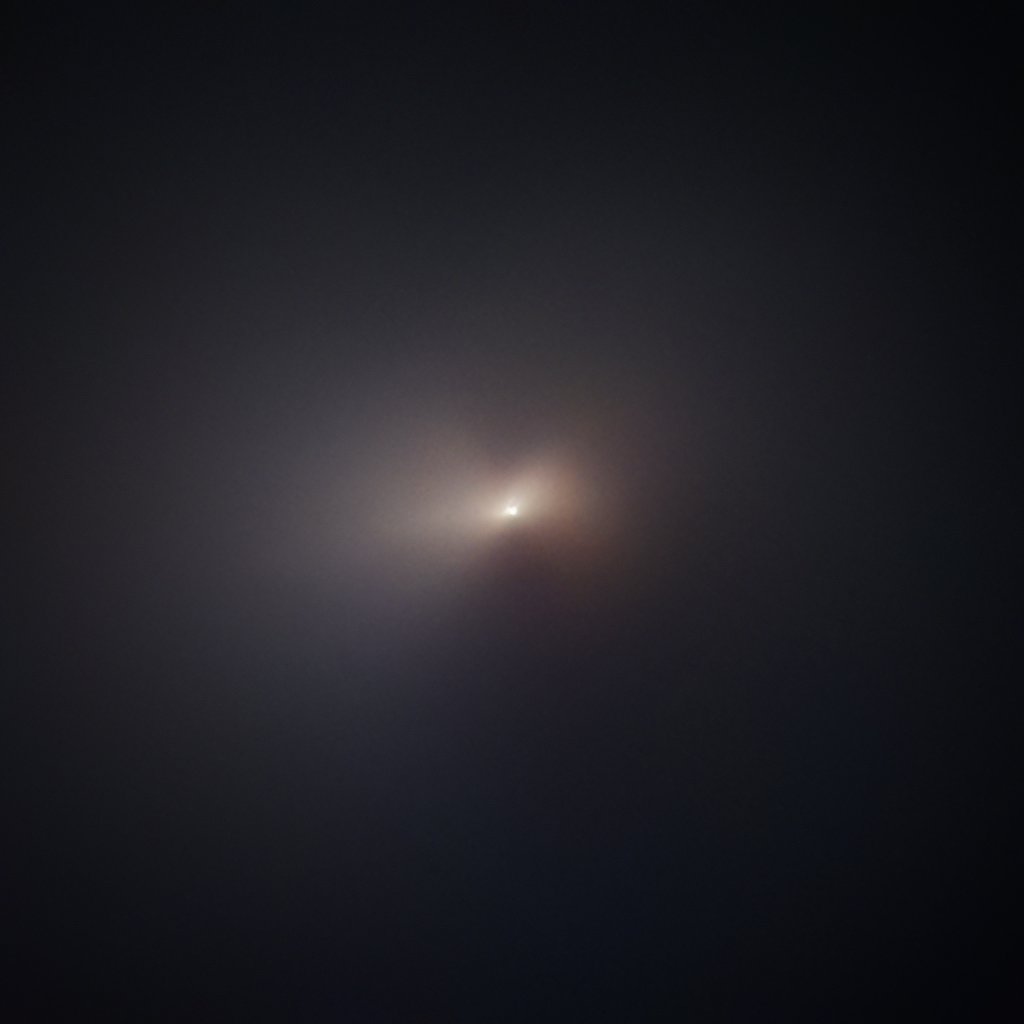

Hubble Captures Comet NEOWISE

The NASA/ESA Hubble Space Telescope has captured the closest images yet of the sky’s latest visitor to make the headlines, comet C/2020 F3 NEOWISE, after it passed by the Sun. This color image of the comet was taken on 8 August 2020.

The two structures appearing on the left and right sides of the comet's center are jets of sublimating ice from beneath the surface of the nucleus, with the resulting dust and gas bring squeezed through at a high velocity. The jets emerge as cone-like structures, then are fanned out by the rotation of the comet's nucleus.

Credit: NASA, ESA, Q. Zhang (California Institute of Technology), A. Pagan (STScI)